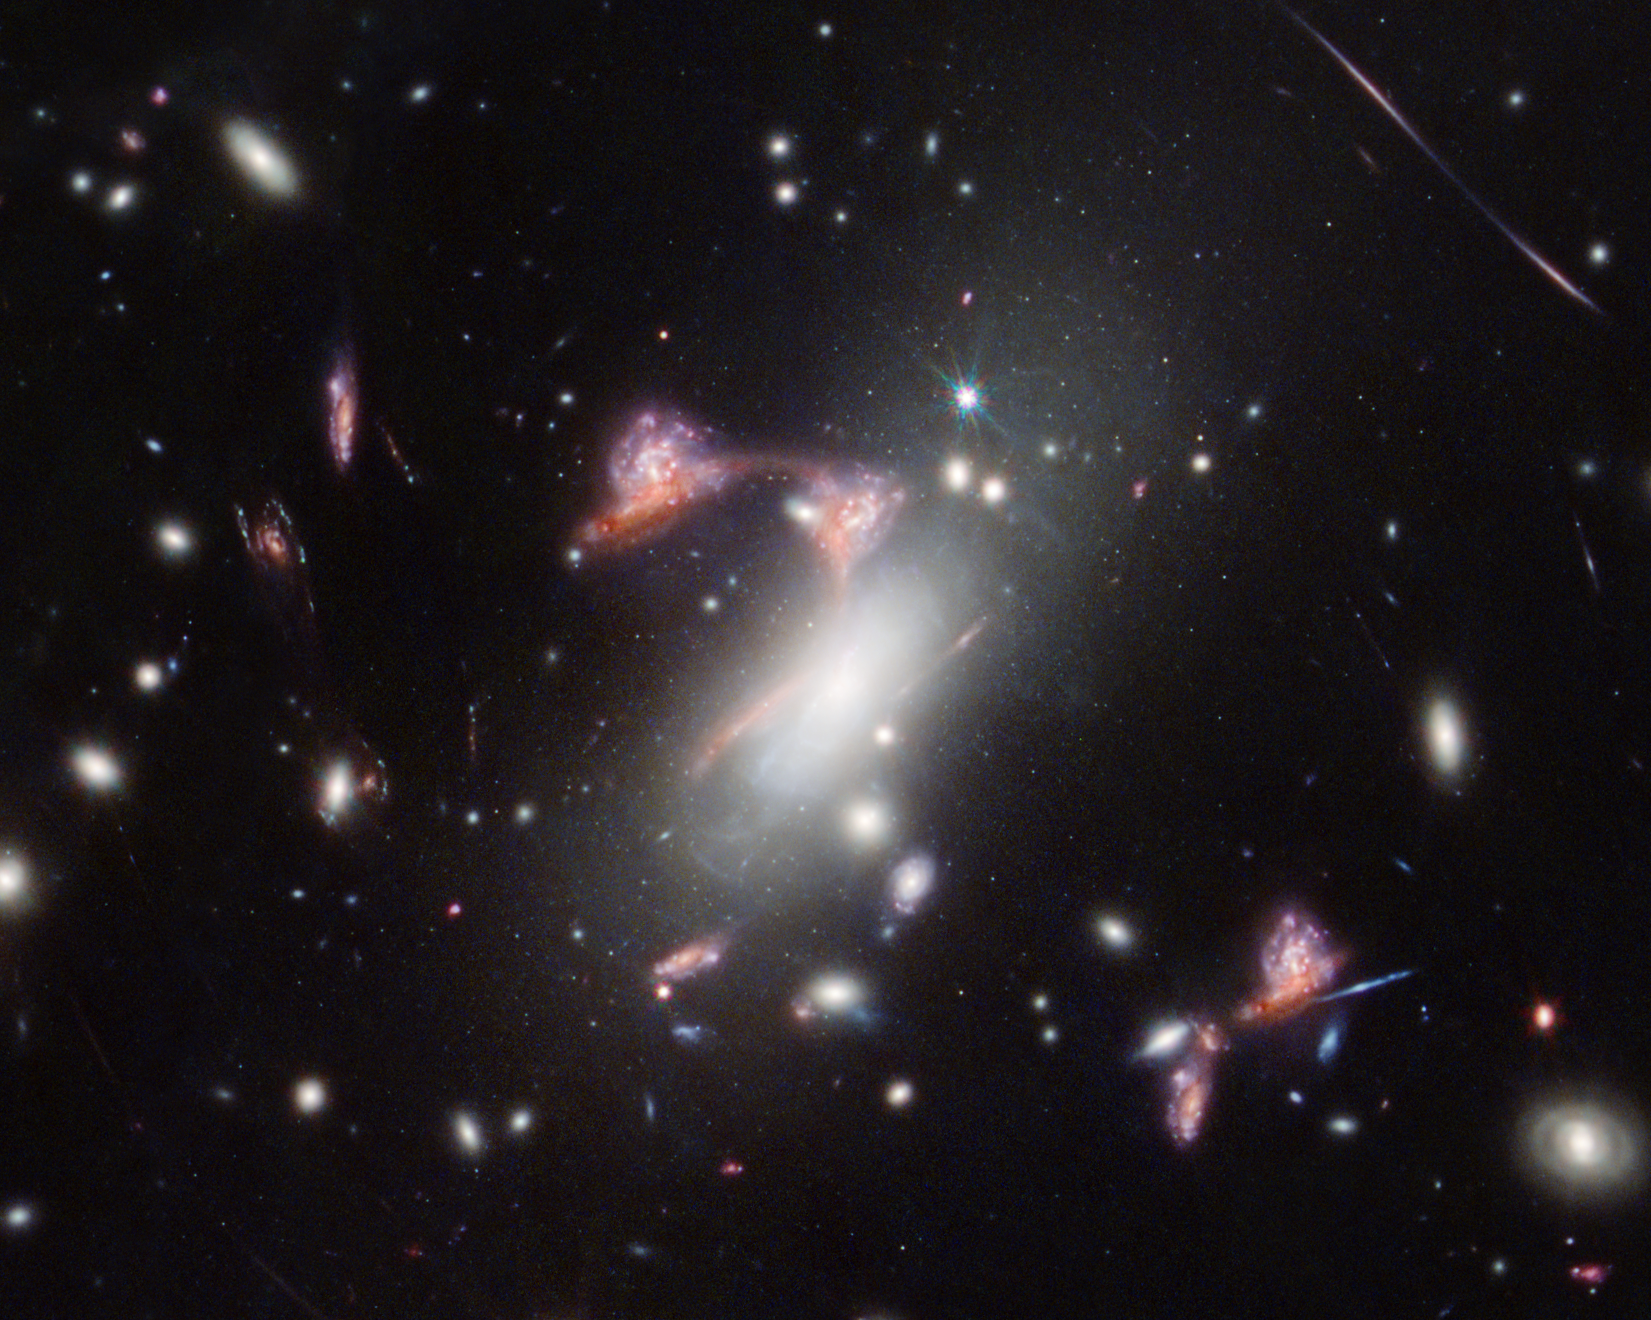

Lensed Question Mark Galaxy (NIRCam)

The galaxy cluster MACS-J0417.5-1154 is so massive it is warping the fabric of space-time and distorting the appearance of galaxies behind it, an effect known as gravitational lensing. This natural phenomenon magnifies distant galaxies and can also make them appear in an image multiple times, as NASA’s James Webb Space Telescope saw here. Two distant, interacting galaxies — a face-on spiral and a dusty red galaxy seen from the side — appear multiple times, tracing a familiar shape across the sky. Active star formation, and the face-on galaxy’s remarkably intact spiral shape, indicate that these galaxies’ interaction is just beginning.

Credit: NASA, ESA, CSA, STScI, V. Estrada-Carpenter (Saint Mary’s University)